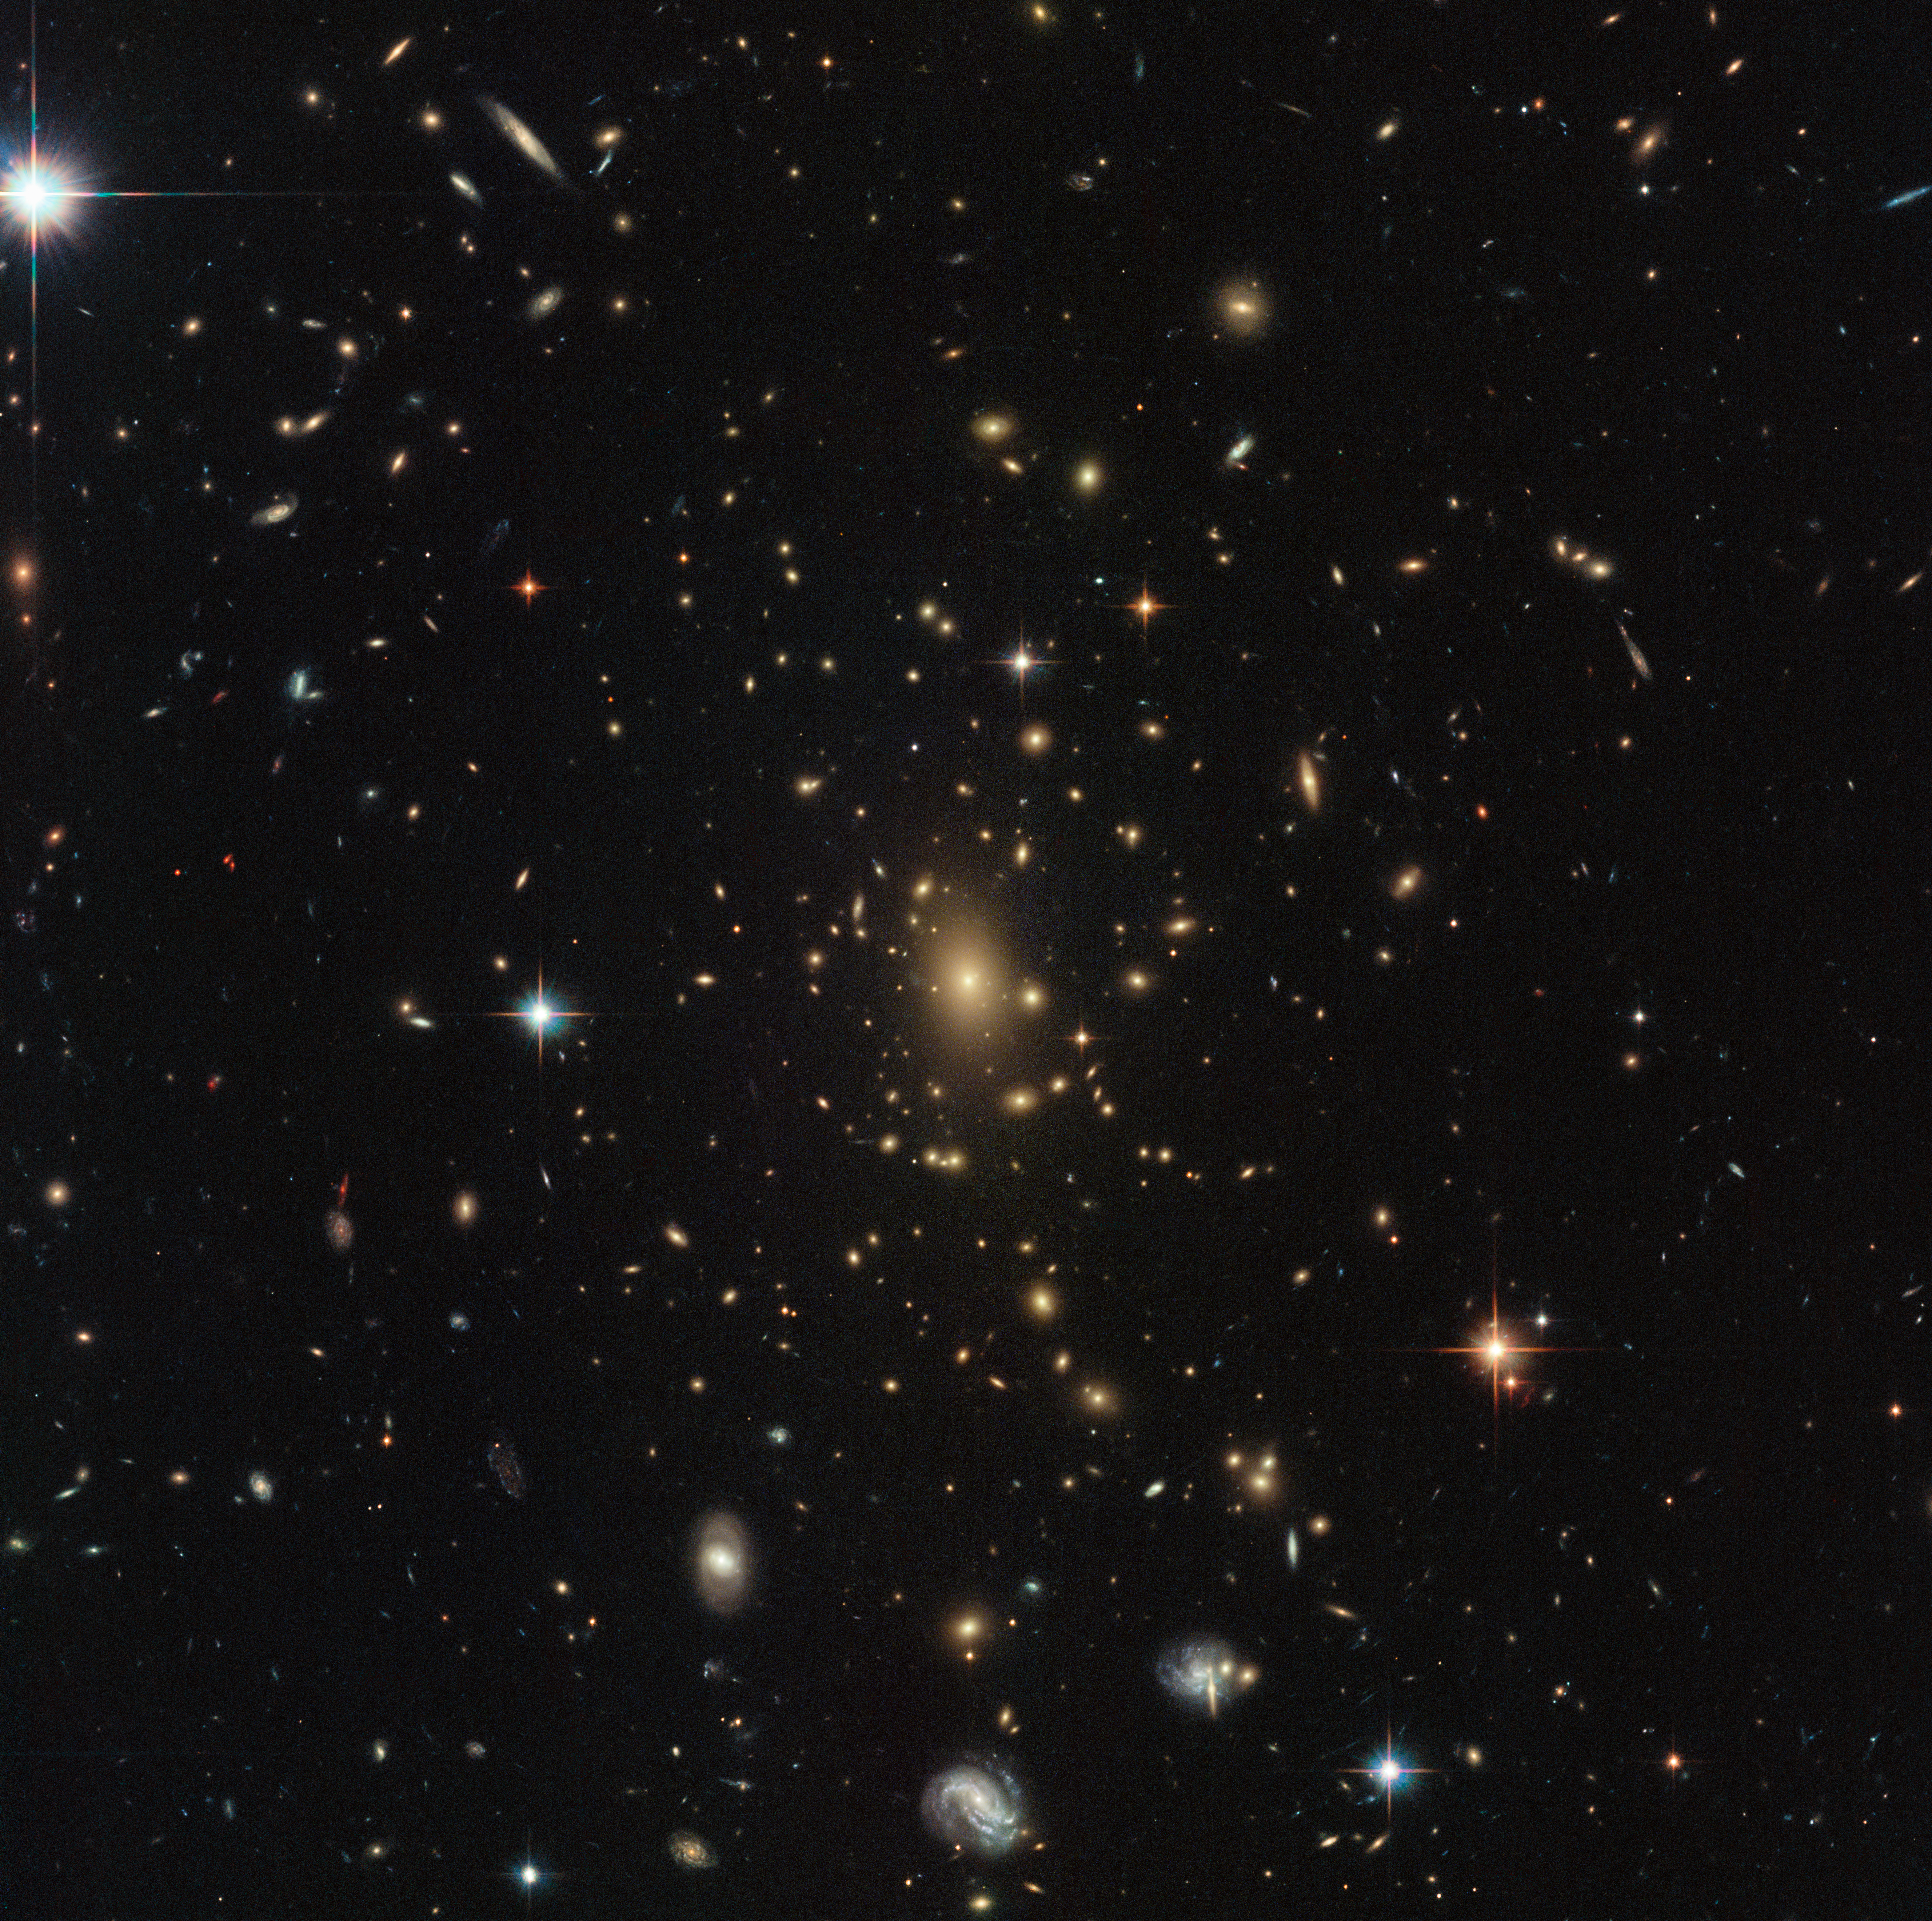

Zooming in on the early Universe

This busy image is a treasure trove of wonders. Bright stars from the Milky Way sparkle in the foreground, the magnificent swirls of several spiral galaxies are visible across the frame, and a glowing assortment of objects at the centre make up a massive galaxy cluster. Such clusters are the biggest objects in the Universe that are held together by gravity, and can contain thousands of galaxies of all shapes and sizes. Typically, they have a mass of about one million billion times the mass of the Sun — unimaginably huge!

Their incredible mass makes clusters very useful natural tools to test theories in astronomy, such as Einstein’s theory of general relativity. This tells us that objects with mass warp the fabric of spacetime around them; the more massive the object, the greater the distortion. An enormous galaxy cluster like this one therefore has a huge influence on the spacetime around it, even distorting the light from more distant galaxies to change a galaxy’s apparent shape, creating multiple images, and amplifying the galaxy’s light — a phenomenon called gravitational lensing.

This image was taken by Hubble’s Advanced Camera for Surveys and Wide-Field Camera 3 as part of an observing programme called RELICS (Reionization Lensing Cluster Survey). RELICS imaged 41 massive galaxy clusters with the aim of finding the brightest distant galaxies for the forthcoming NASA/ESA/CSA James Webb Space Telescope (JWST) to study.

Credit: ESA/Hubble & NASA, RELICS